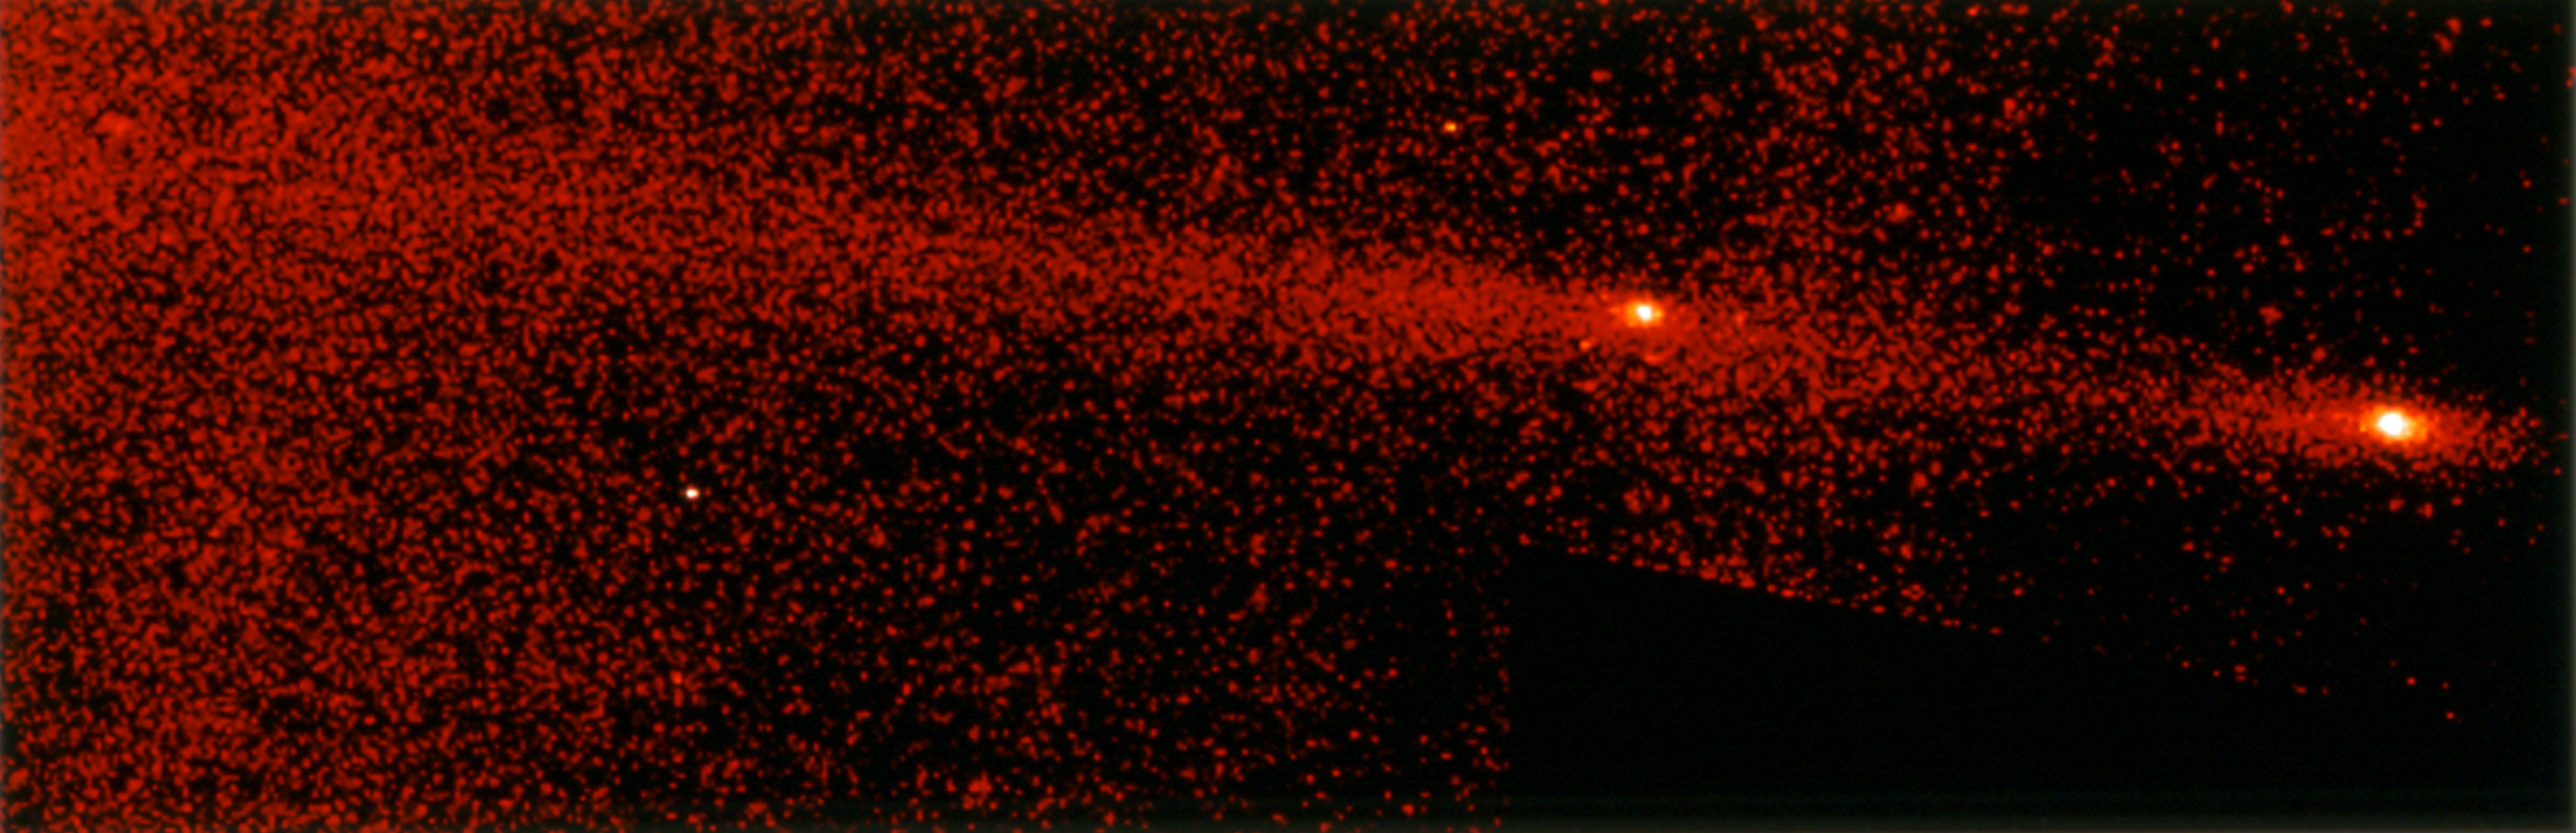

Comet P/Shoemaker-Levy 9

This image shows the "gang of four' region of Comet P/Shoemaker-Levy 9 roughly 12 months before its impact with Jupiter.

Credit: NASA & ESA